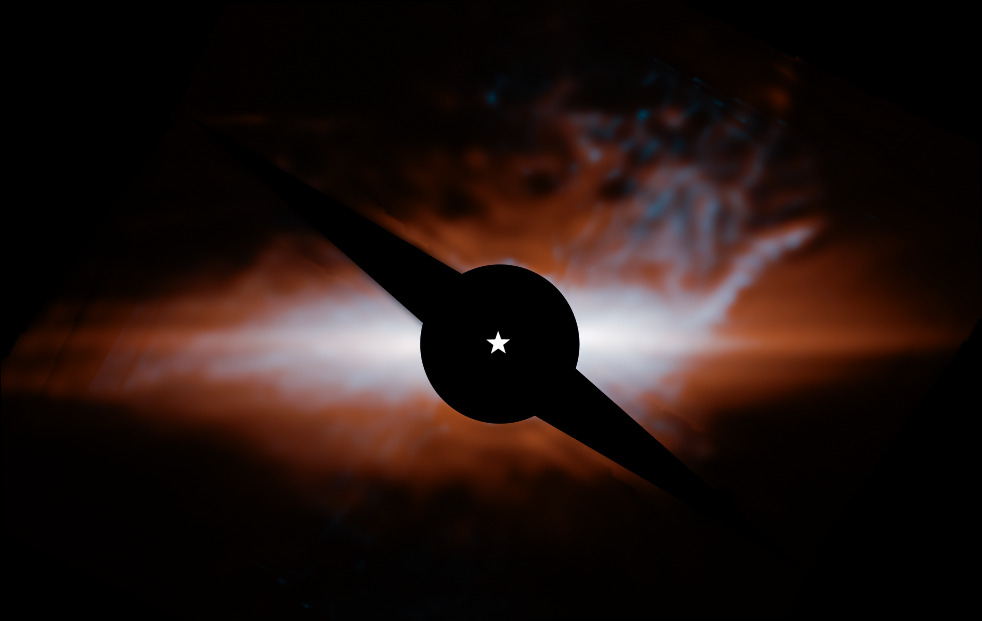

Star system Beta Pictoris (MIRI image)

This image from Webb’s MIRI (Mid-Infrared Instrument) shows the star system Beta Pictoris. An edge-on disc of dusty debris generated by collisions between planetesimals (orange) dominates the view. A hotter, secondary disc (cyan) is inclined by about 5 degrees relative to the primary disc. The curved feature at upper right, which the science team nicknamed the “cat’s tail,” has never been seen before. A coronagraph (black circle and bar) has been used to block the light of the central star, whose location is marked with a white star shape. In this image light at 15.5 microns is coloured cyan and 23 microns is orange (filters F1550C and F2300C, respectively).

Credit: NASA, ESA, CSA, STScI, C. Stark and K. Lawson (NASA GSFC), J. Kammerer (ESO), and M. Perrin (STScI).